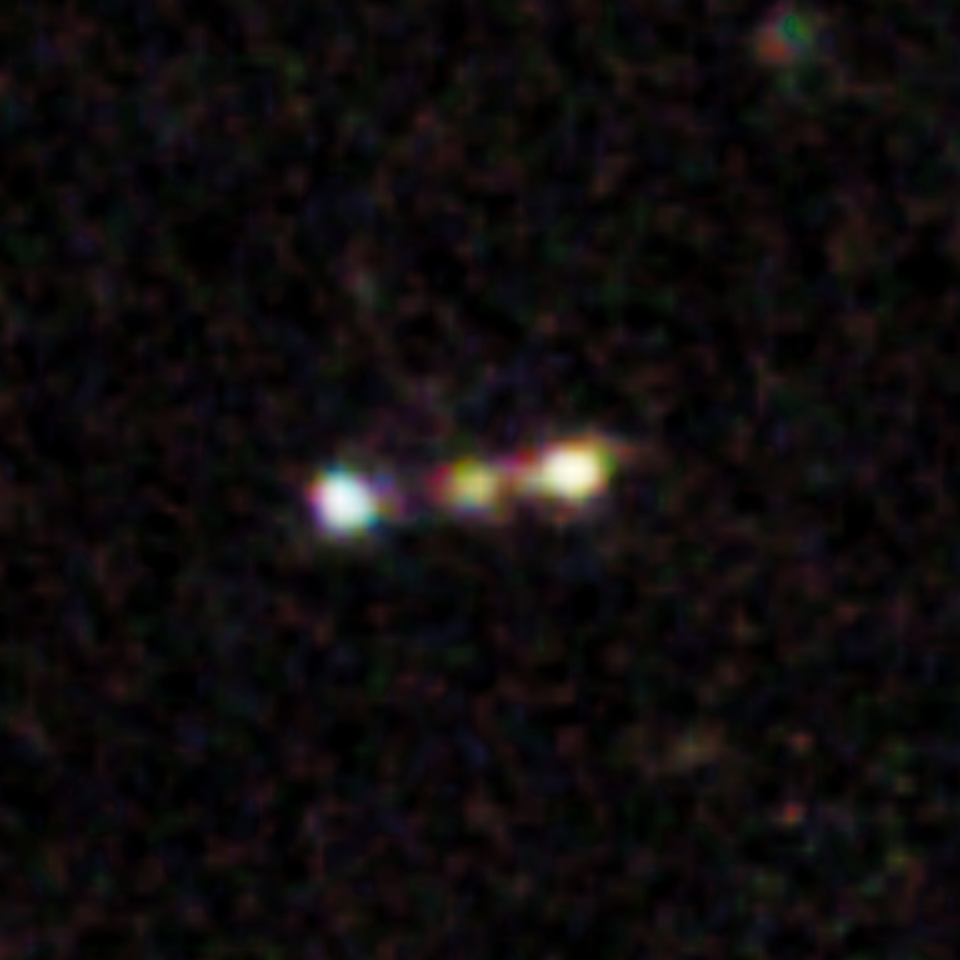

Himiko (Hubble close-up view)

This image shows a giant primordial bubble of gas dubbed "Himiko" (after the queen of ancient Japan), as viewed by Hubble.

Astronomers using the combined power of the NASA/ESA Hubble Space Telescope and the Atacama Large Millimeter/submillimeter Array (ALMA) telescope have discovered that a trio of primitive galaxies are actually nestled inside this enormous gas blob. The rare triple system existed when the Universe was only 800 million years old. The trio may eventually merge into a single massive galaxy, researchers predict.

Credit: NASA, ESA, ESO, NRAO, NAOJ, JAO, M. Ouchi (University of Tokyo), R. Ellis (California Institute of Technology), Y. Ono (University of Tokyo), K. Nakanishi (The Graduate University for Advanced Studies (SOKENDAI) and Joint ALMA Observatory), K. Kohno and R. Momose (University of Tokyo), Y. Kurono (Joint ALMA Observatory), M. Ashby (Harvard-Smithsonian Center for Astrophysics), K. Shimasaku (University of Tokyo), S. Willner and G. Fazio (Harvard-Smithsonian Center for Astrophysics), Y. Tamura (University of Tokyo), and D. Iono (National Astronomical Observatory of Japan)